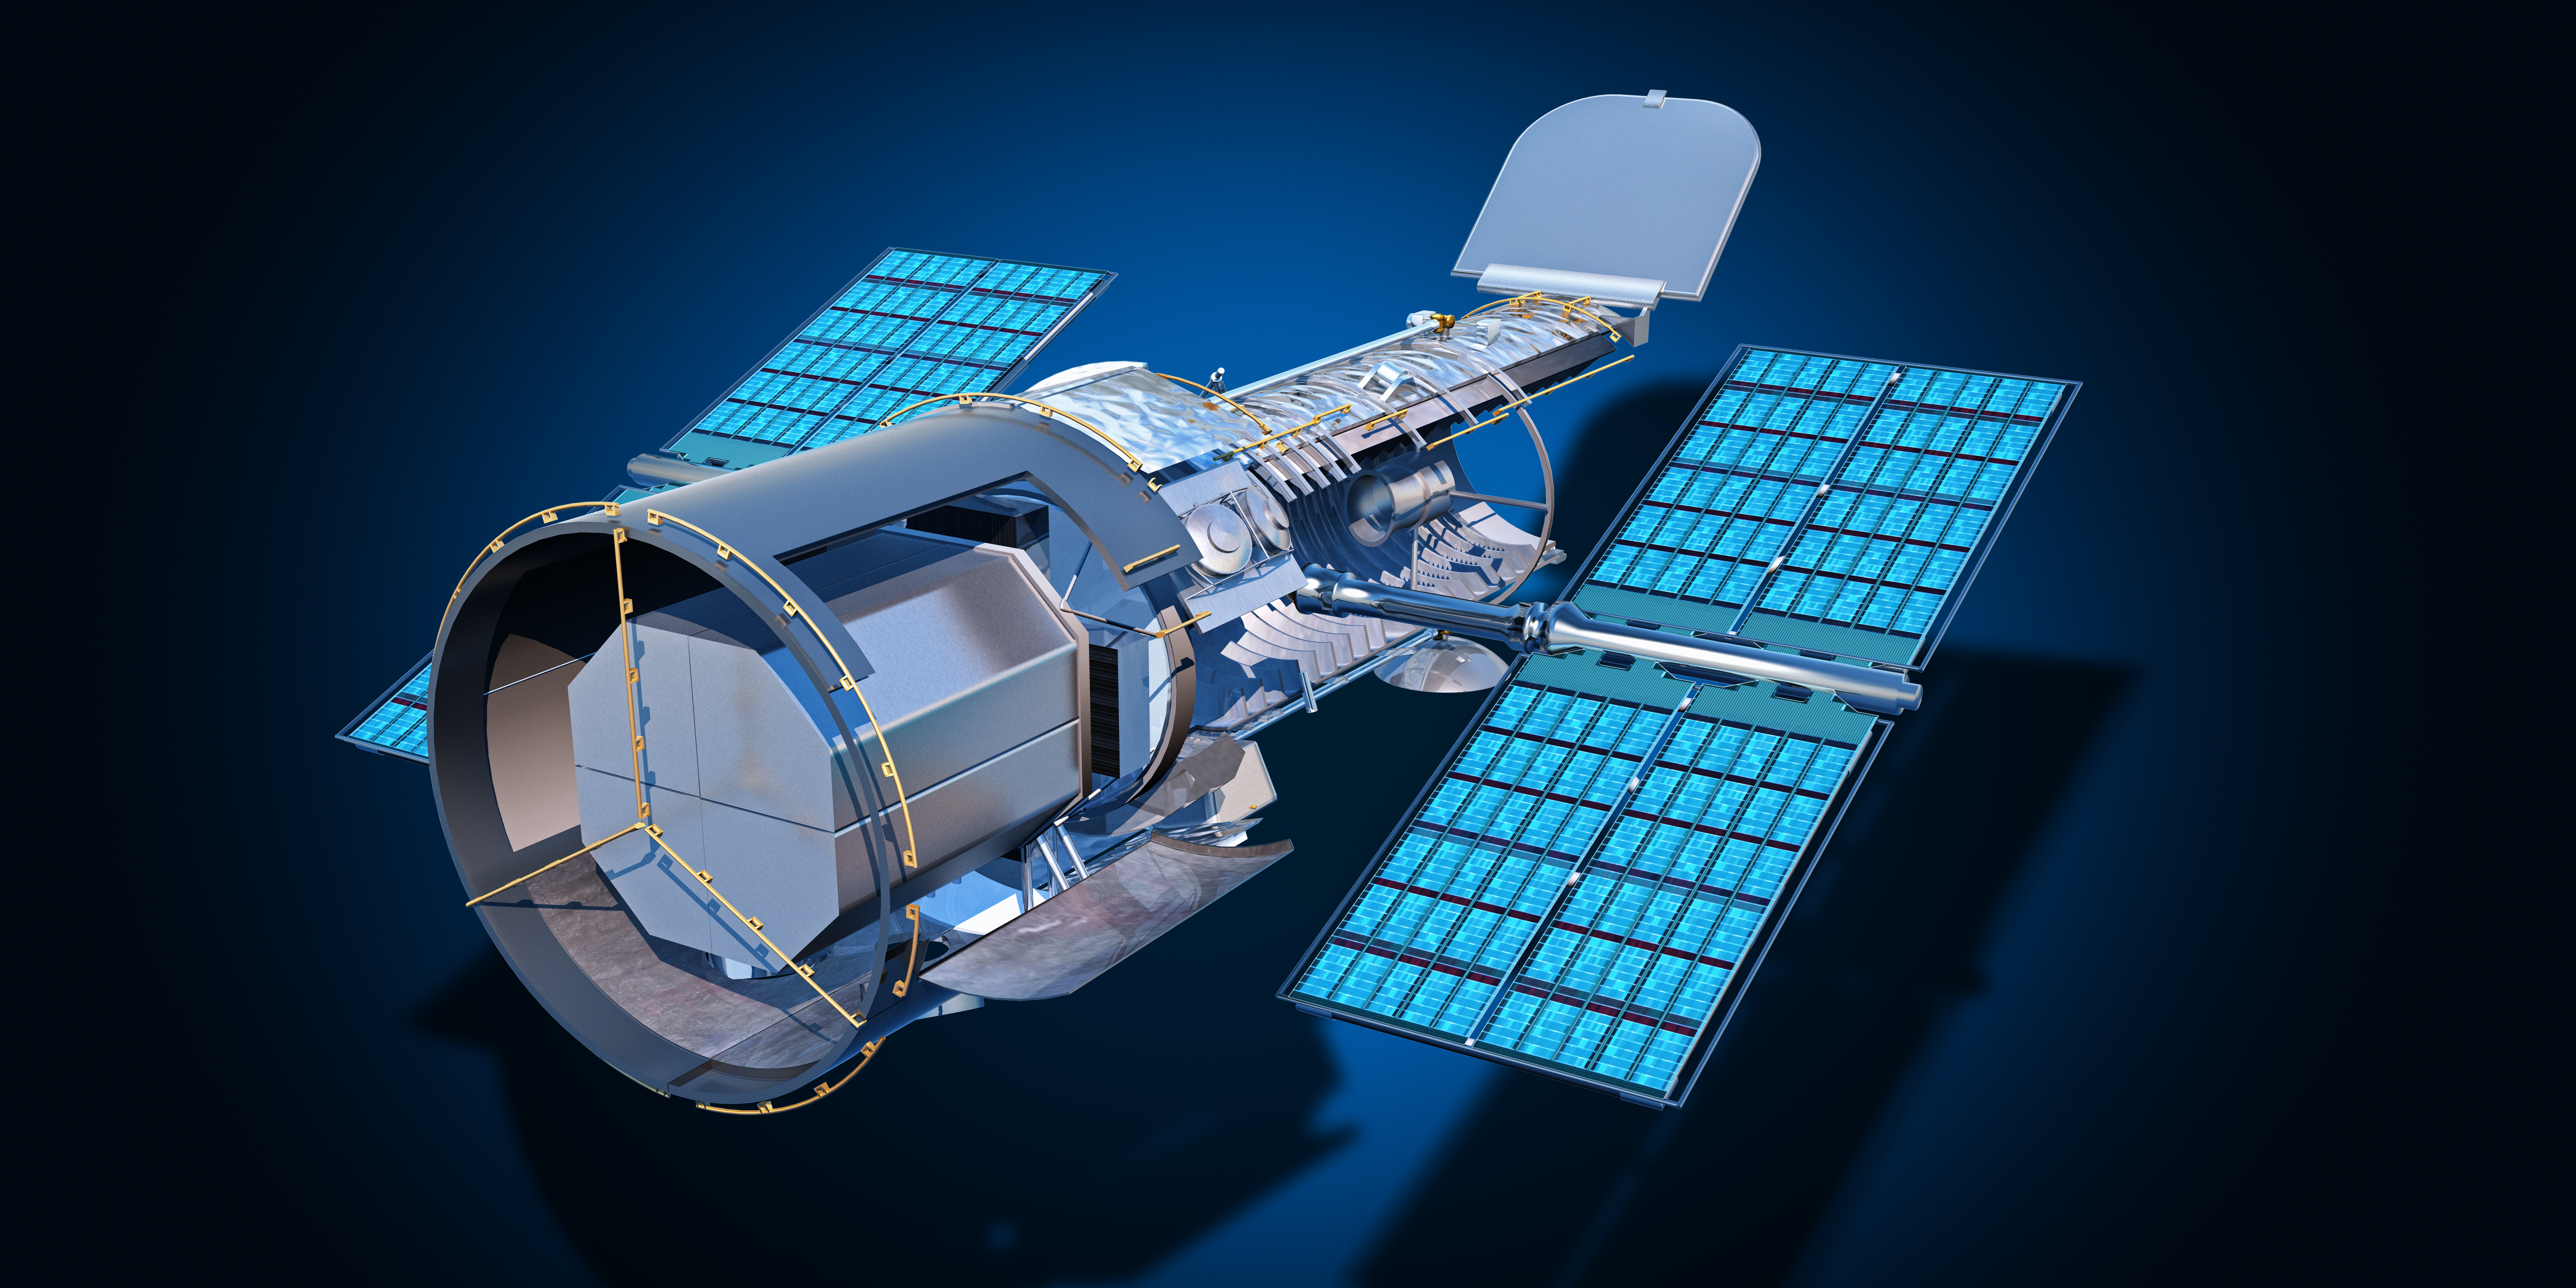

Hubble exploded view

Hubble Exploded View

Credit: NASA & ESA